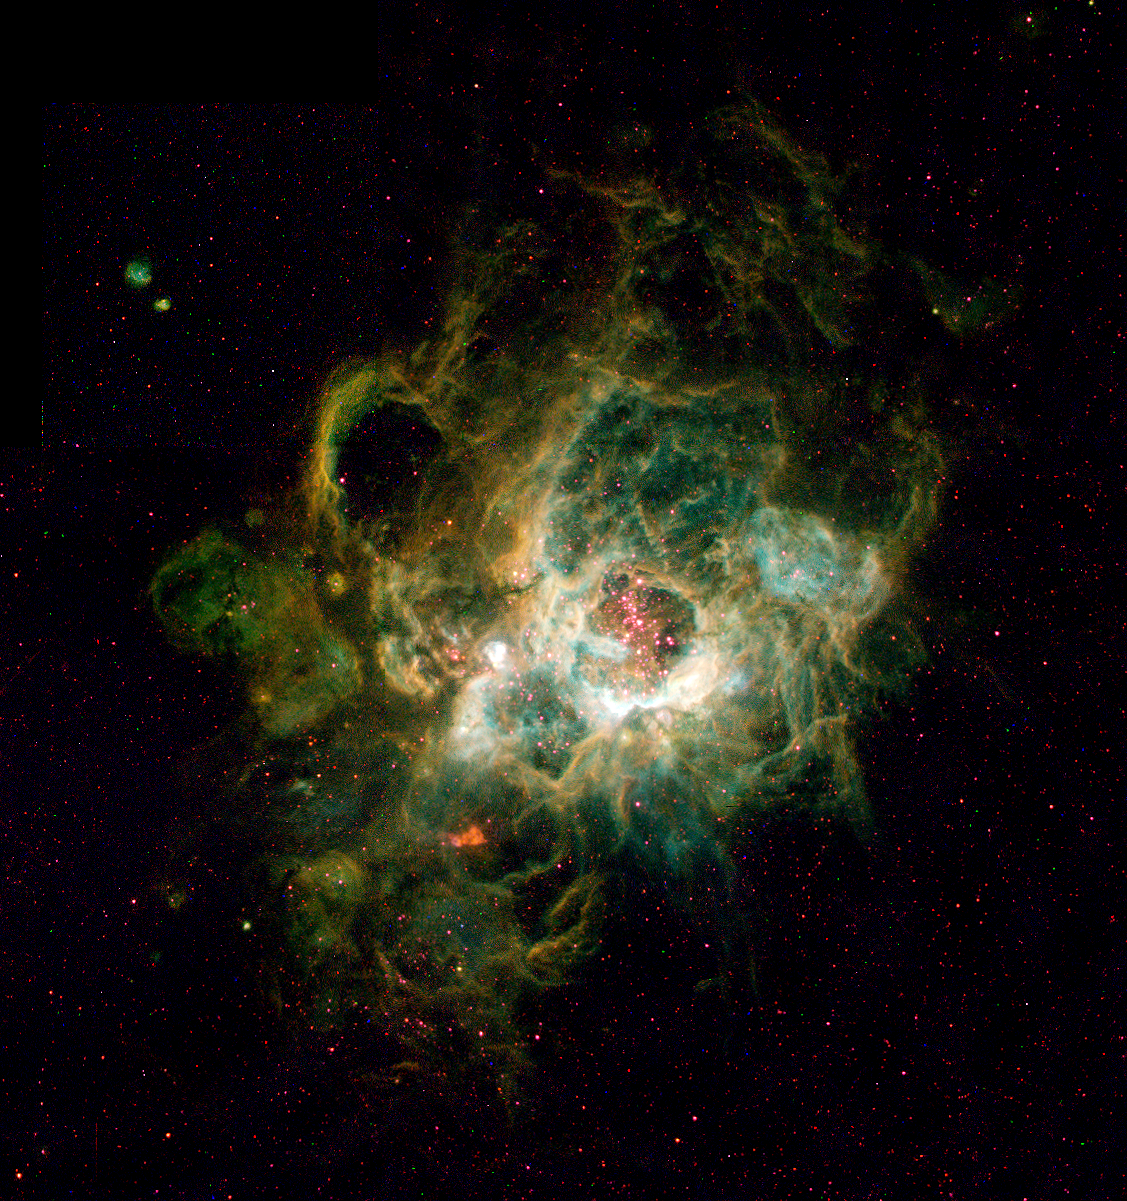

NGC 604 in galaxy M33

This is a Hubble Space Telescope image (right) of a vast nebula called NGC 604, which lies in the neighbouring spiral galaxy Messier 33, located 2.7 million light-years away in the constellation Triangulum.

Credit: Hui Yang (University of Illinois) and NASA/ESA